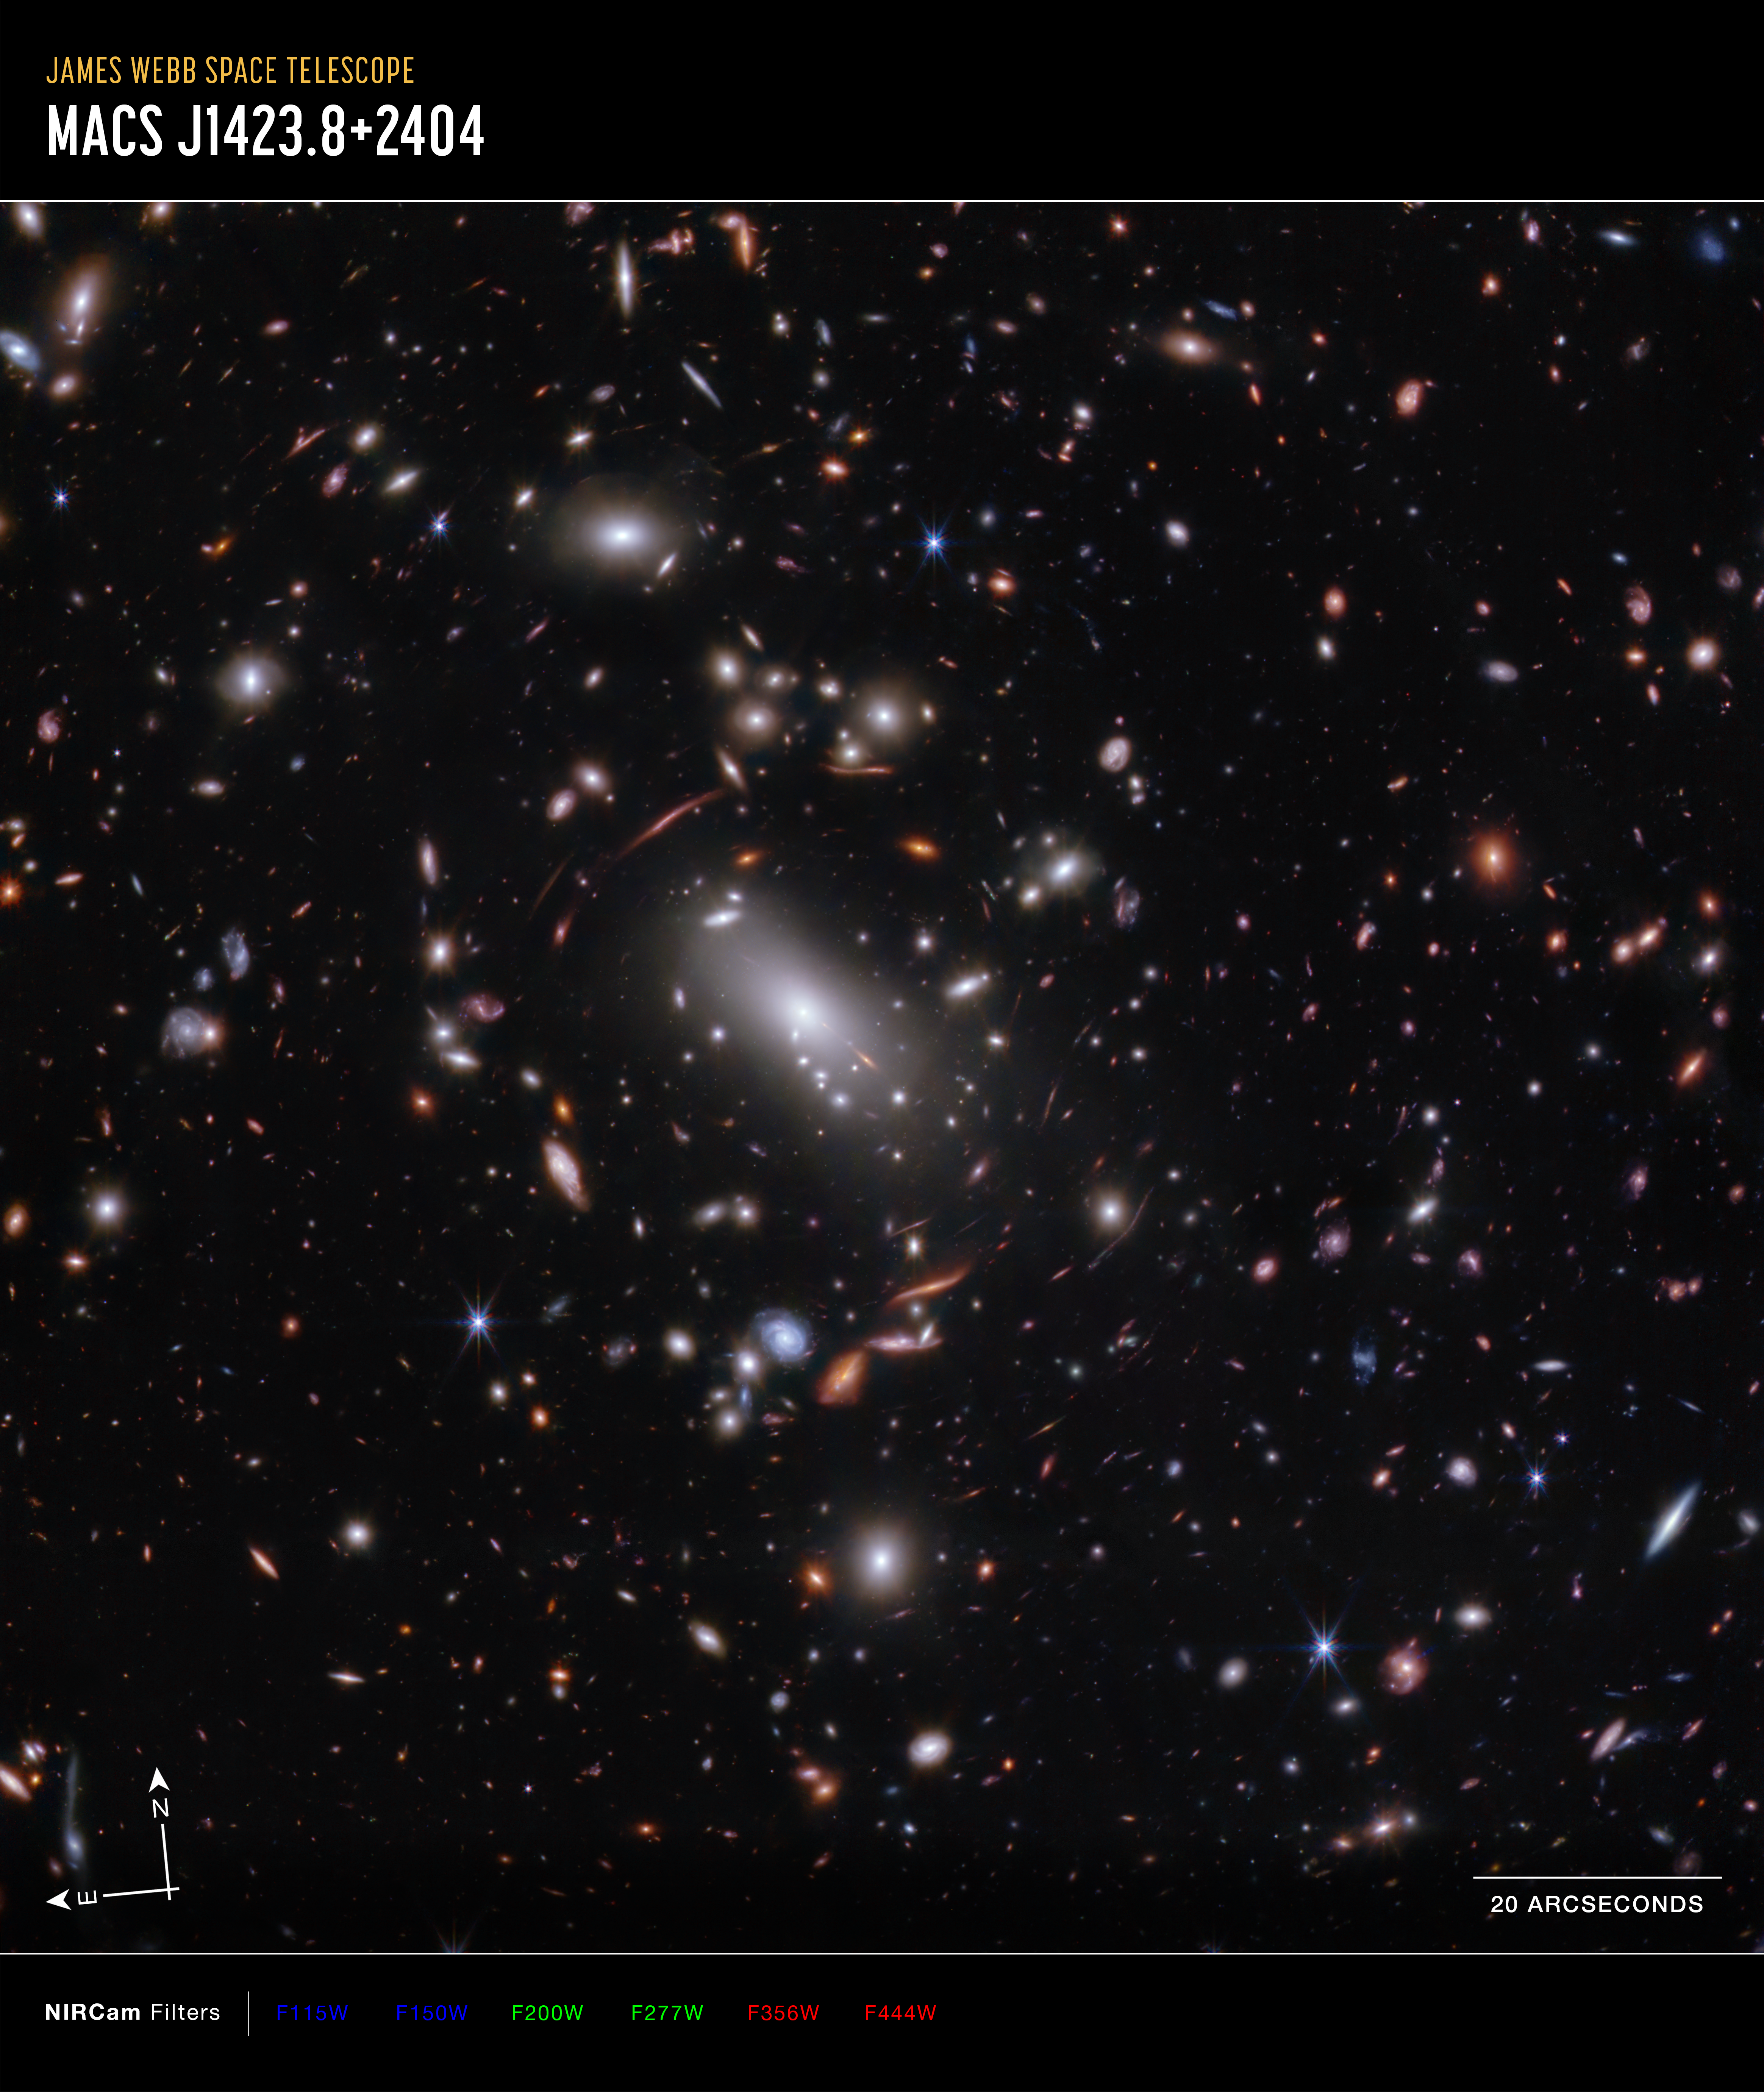

Galaxy cluster MACS J1423 (NIRCam image, annotated)

Thousands of glimmering galaxies are bound together by their own gravity, making up a massive cluster formally classified as MACS J1423.

The largest bright white oval is a supergiant elliptical galaxy that is the dominant member of this galaxy cluster. The galaxy cluster acts like a lens, magnifying and distorting the light from objects that lie well behind it, an effect known as gravitational lensing that has big research benefits. Astronomers can study lensed galaxies in detail, like the Firefly Sparkle galaxy.

This 2023 image is from the James Webb Space Telescope’s NIRCam (Near-Infrared Camera). Researchers used Webb to survey the same field the Hubble Space Telescope imaged in 2010. Thanks to its specialisation in high-resolution near-infrared imagery, Webb was able to show researchers many more galaxies in far more detail.

The north and east compass arrows show the orientation of the image on the sky.

The scale bar is labelled in arcseconds, which is a measure of angular distance on the sky. One arcsecond is equal to an angular measurement of 1/3600 of one degree. There are 60 arcminutes in a degree and 60 arcseconds in an arcminute. (The full Moon has an angular diameter of about 30 arcminutes.) The actual size of an object that covers one arcsecond on the sky depends on its distance from the telescope.

This image shows invisible near-infrared wavelengths of light that have been translated into visible-light colours. The colour key shows which NIRCam filters were used when collecting the light. The colour of each filter name is the visible light colour used to represent the infrared light that passes through that filter.

NIRCam filters from left to right: F115W and F150W are blue; F200W and F277W are green; F356W and F444W are red.

Credit: NASA, ESA, CSA, STScI, C. Willott (NRC-Canada), L. Mowla (Wellesley College), K. Iyer (Columbia)